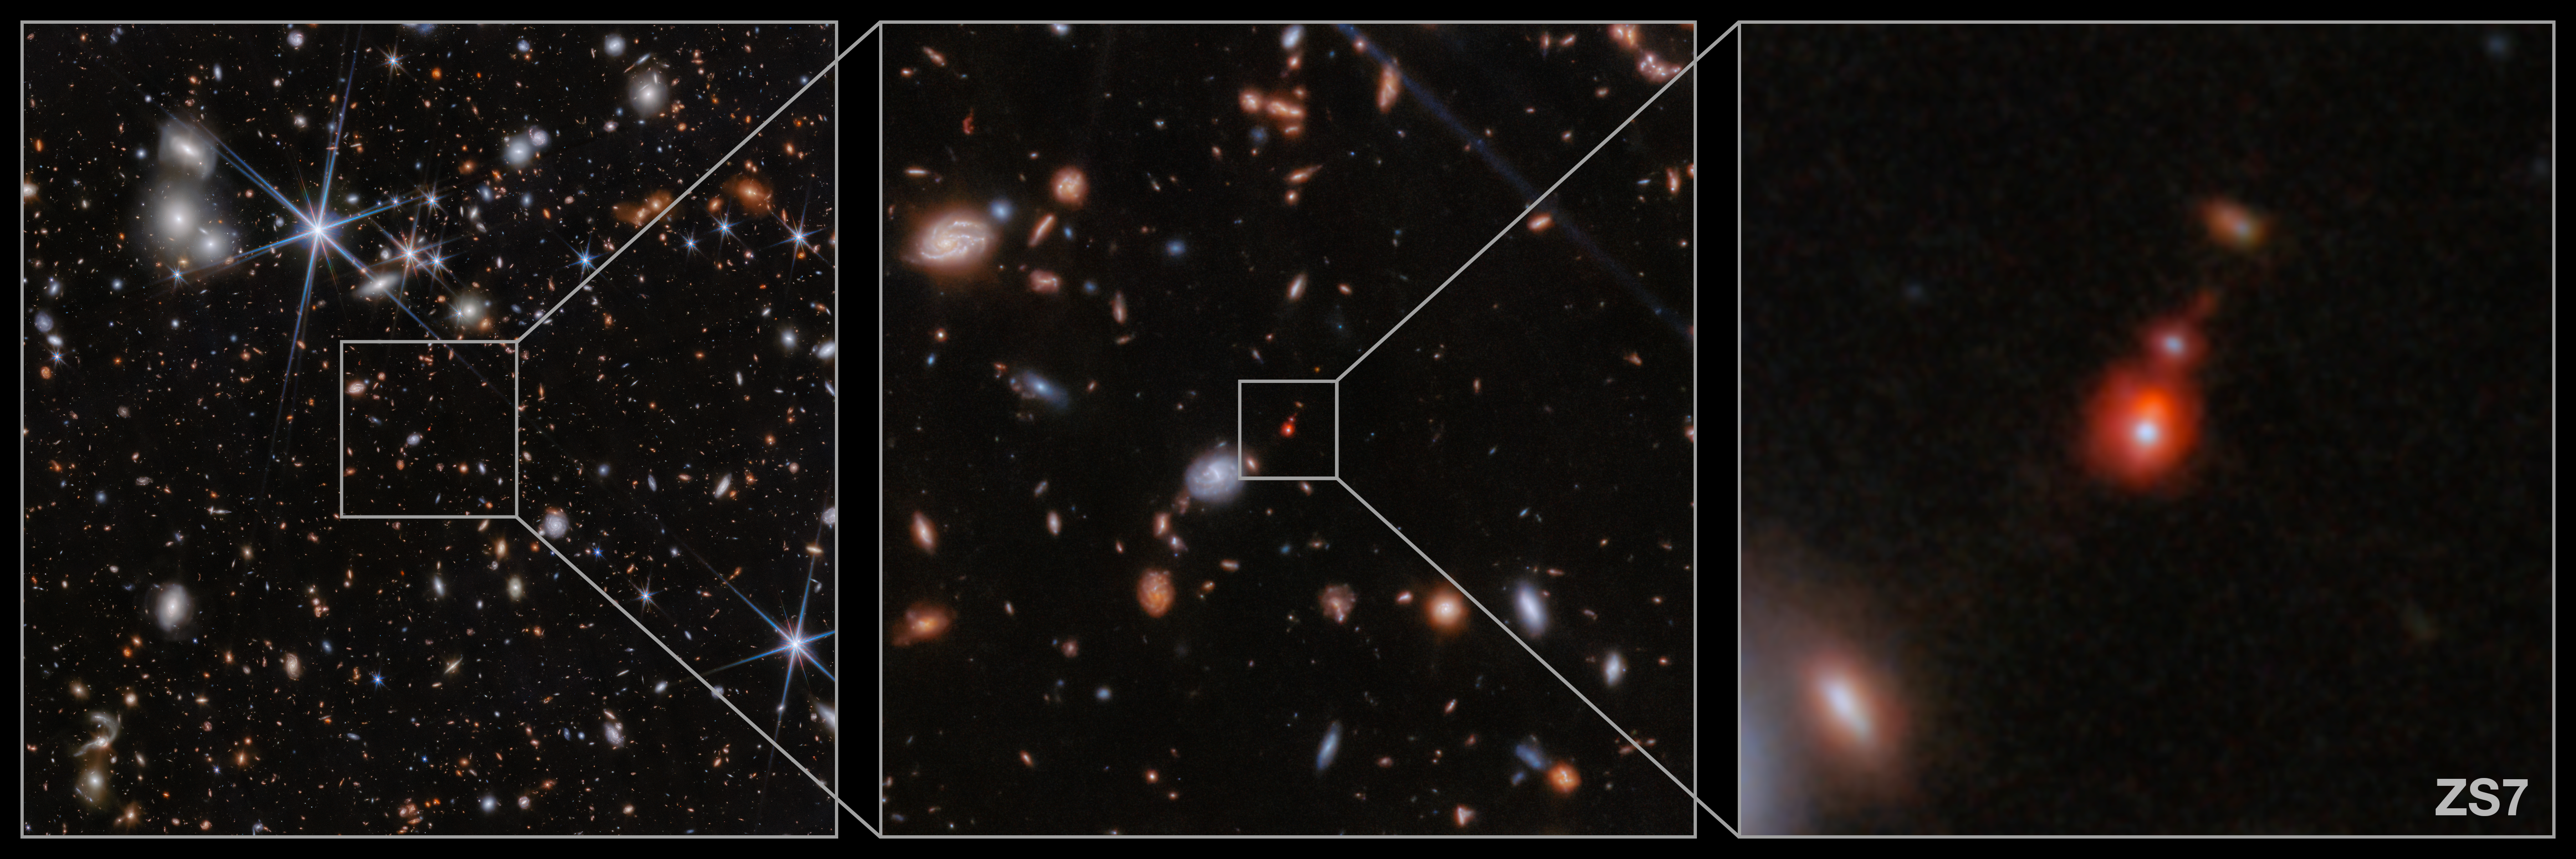

ZS7 location in PRIMER image (NIRcam image)

This image shows the location of the galaxy system ZS7 from the JWST PRIMER programme (PI: J. Dunlop). New research using the NIRSpec instrument on the NASA/ESA/CSA James Webb Space Telescope have determined the system to be evidence of an ongoing merger of two galaxies and their massive black holes when the Universe was only 740 million years old. This marks the most distant detection of a black hole merger ever obtained and the first time that this phenomenon has been detected so early in the Universe.

The team has found evidence for very dense gas with fast motions in the vicinity of the black hole, as well as hot and highly ionised gas illuminated by the energetic radiation typically produced by black holes in their accretion episodes. Webb also allowed the team to spatially separate the two black holes and determined that one of the two black holes has a mass that is 50 million times the mass of the Sun. The mass of the other black hole is likely similar, although it is harder to measure because this second black hole is buried in dense gas.

In this Webb NIRCam image, the ionised hydrogen (Hβ) emission in the ZS7 system is identified by the orange region and the doubly ionised oxygen (OIII) emission is visible in dark red (right image).

Credit: ESA/Webb, NASA, CSA, J. Dunlop, D. Magee, P. G. Pérez-González, H. Übler, R. Maiolino, et. al